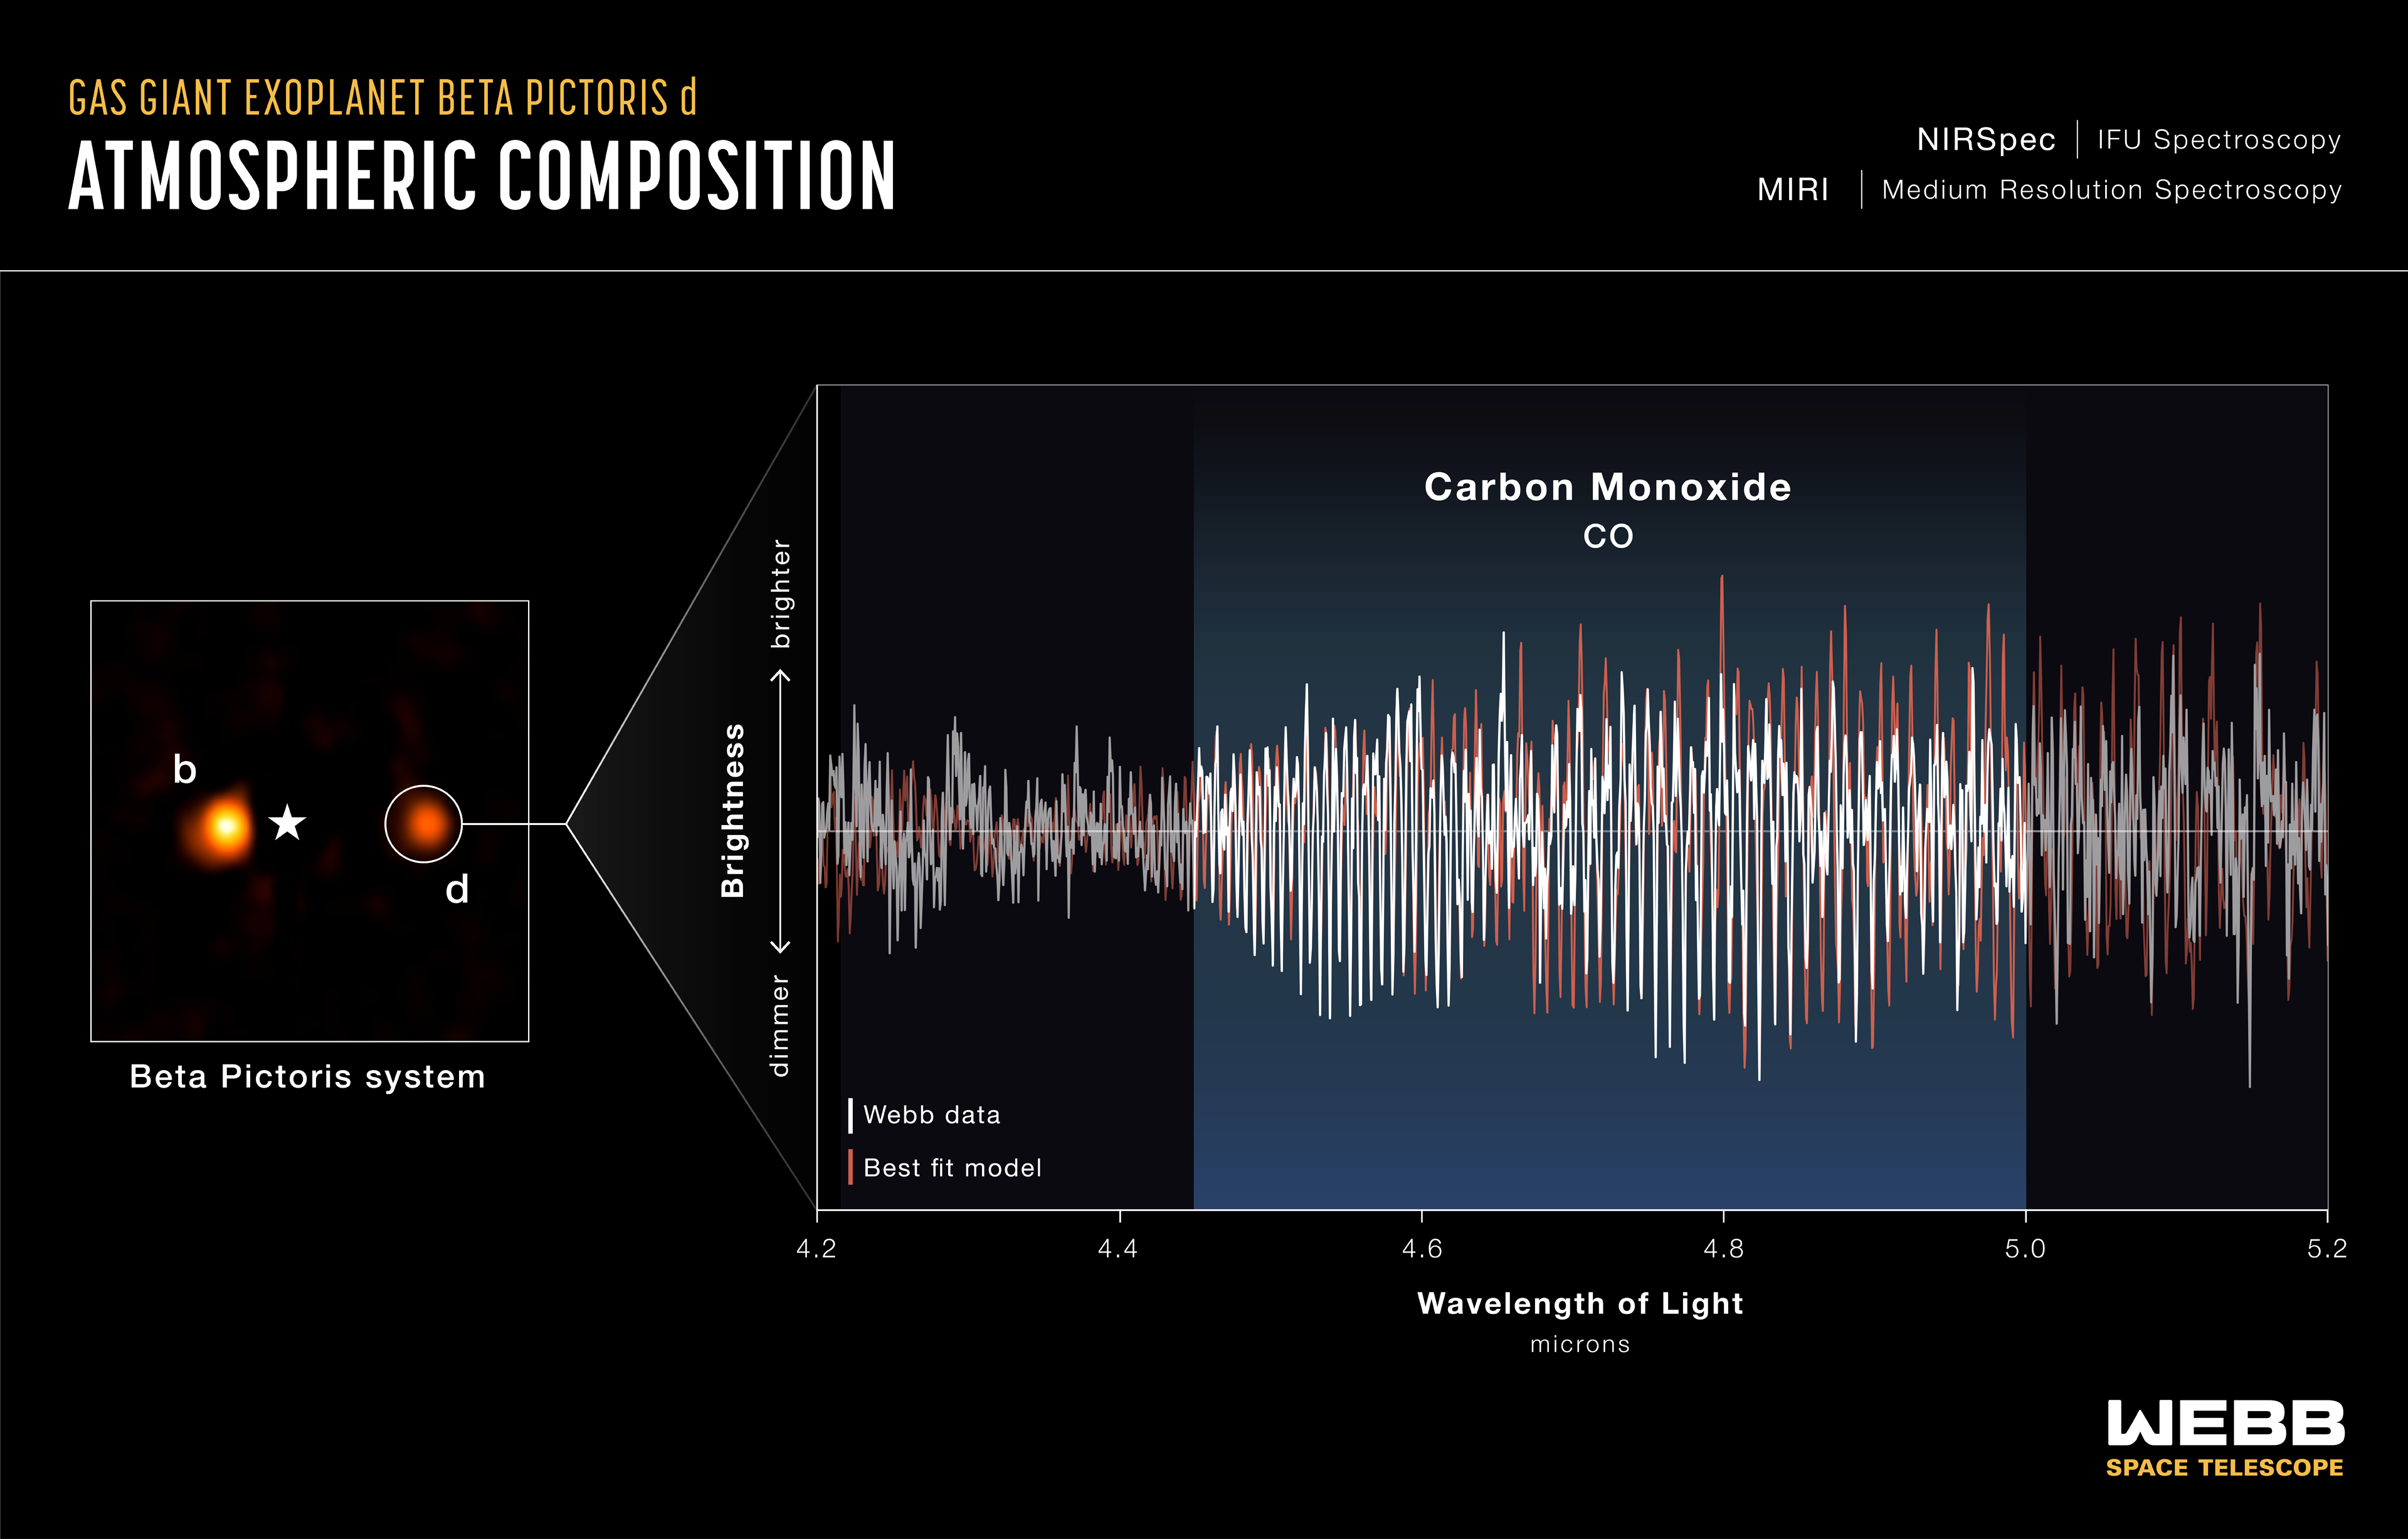

Beta Pictoris system (NIRSpec IFU image and spectrum)

Researchers used the NIRSpec (Near-Infrared Spectrograph) Integral Field Unit on the NASA/ESA/CSA James Webb Space Telescope to map chemical contents of the Beta Pictoris system. As a result, they discovered a third planet, Beta Pictoris d, orbiting the young star.

Instead of identifying the planet as a bright point of light, as seen in the reconstructed image, researchers searched the spectroscopic data for the molecular signatures expected from a giant planet atmosphere, allowing the object to stand out from the surrounding debris disc.

The extracted NIRSpec and MIRI (Mid-Infrared Instrument) spectra of Beta Pictoris d display a distinctive series of carbon monoxide (CO) absorption lines. This molecular “fingerprint” identified the object as a giant planet, while measurements of the Doppler shift of the spectral lines provided the planet’s radial velocity, confirming it is gravitationally bound to the Beta Pictoris system.

Credit: NASA, ESA, CSA, STScI, L. Hustak (STScI). Science: A. Gibbs (UC San Diego), J. B. Ruffio (UC San Diego), A. Bidot (STScI). Image Processing: A. Pagan (STScI)